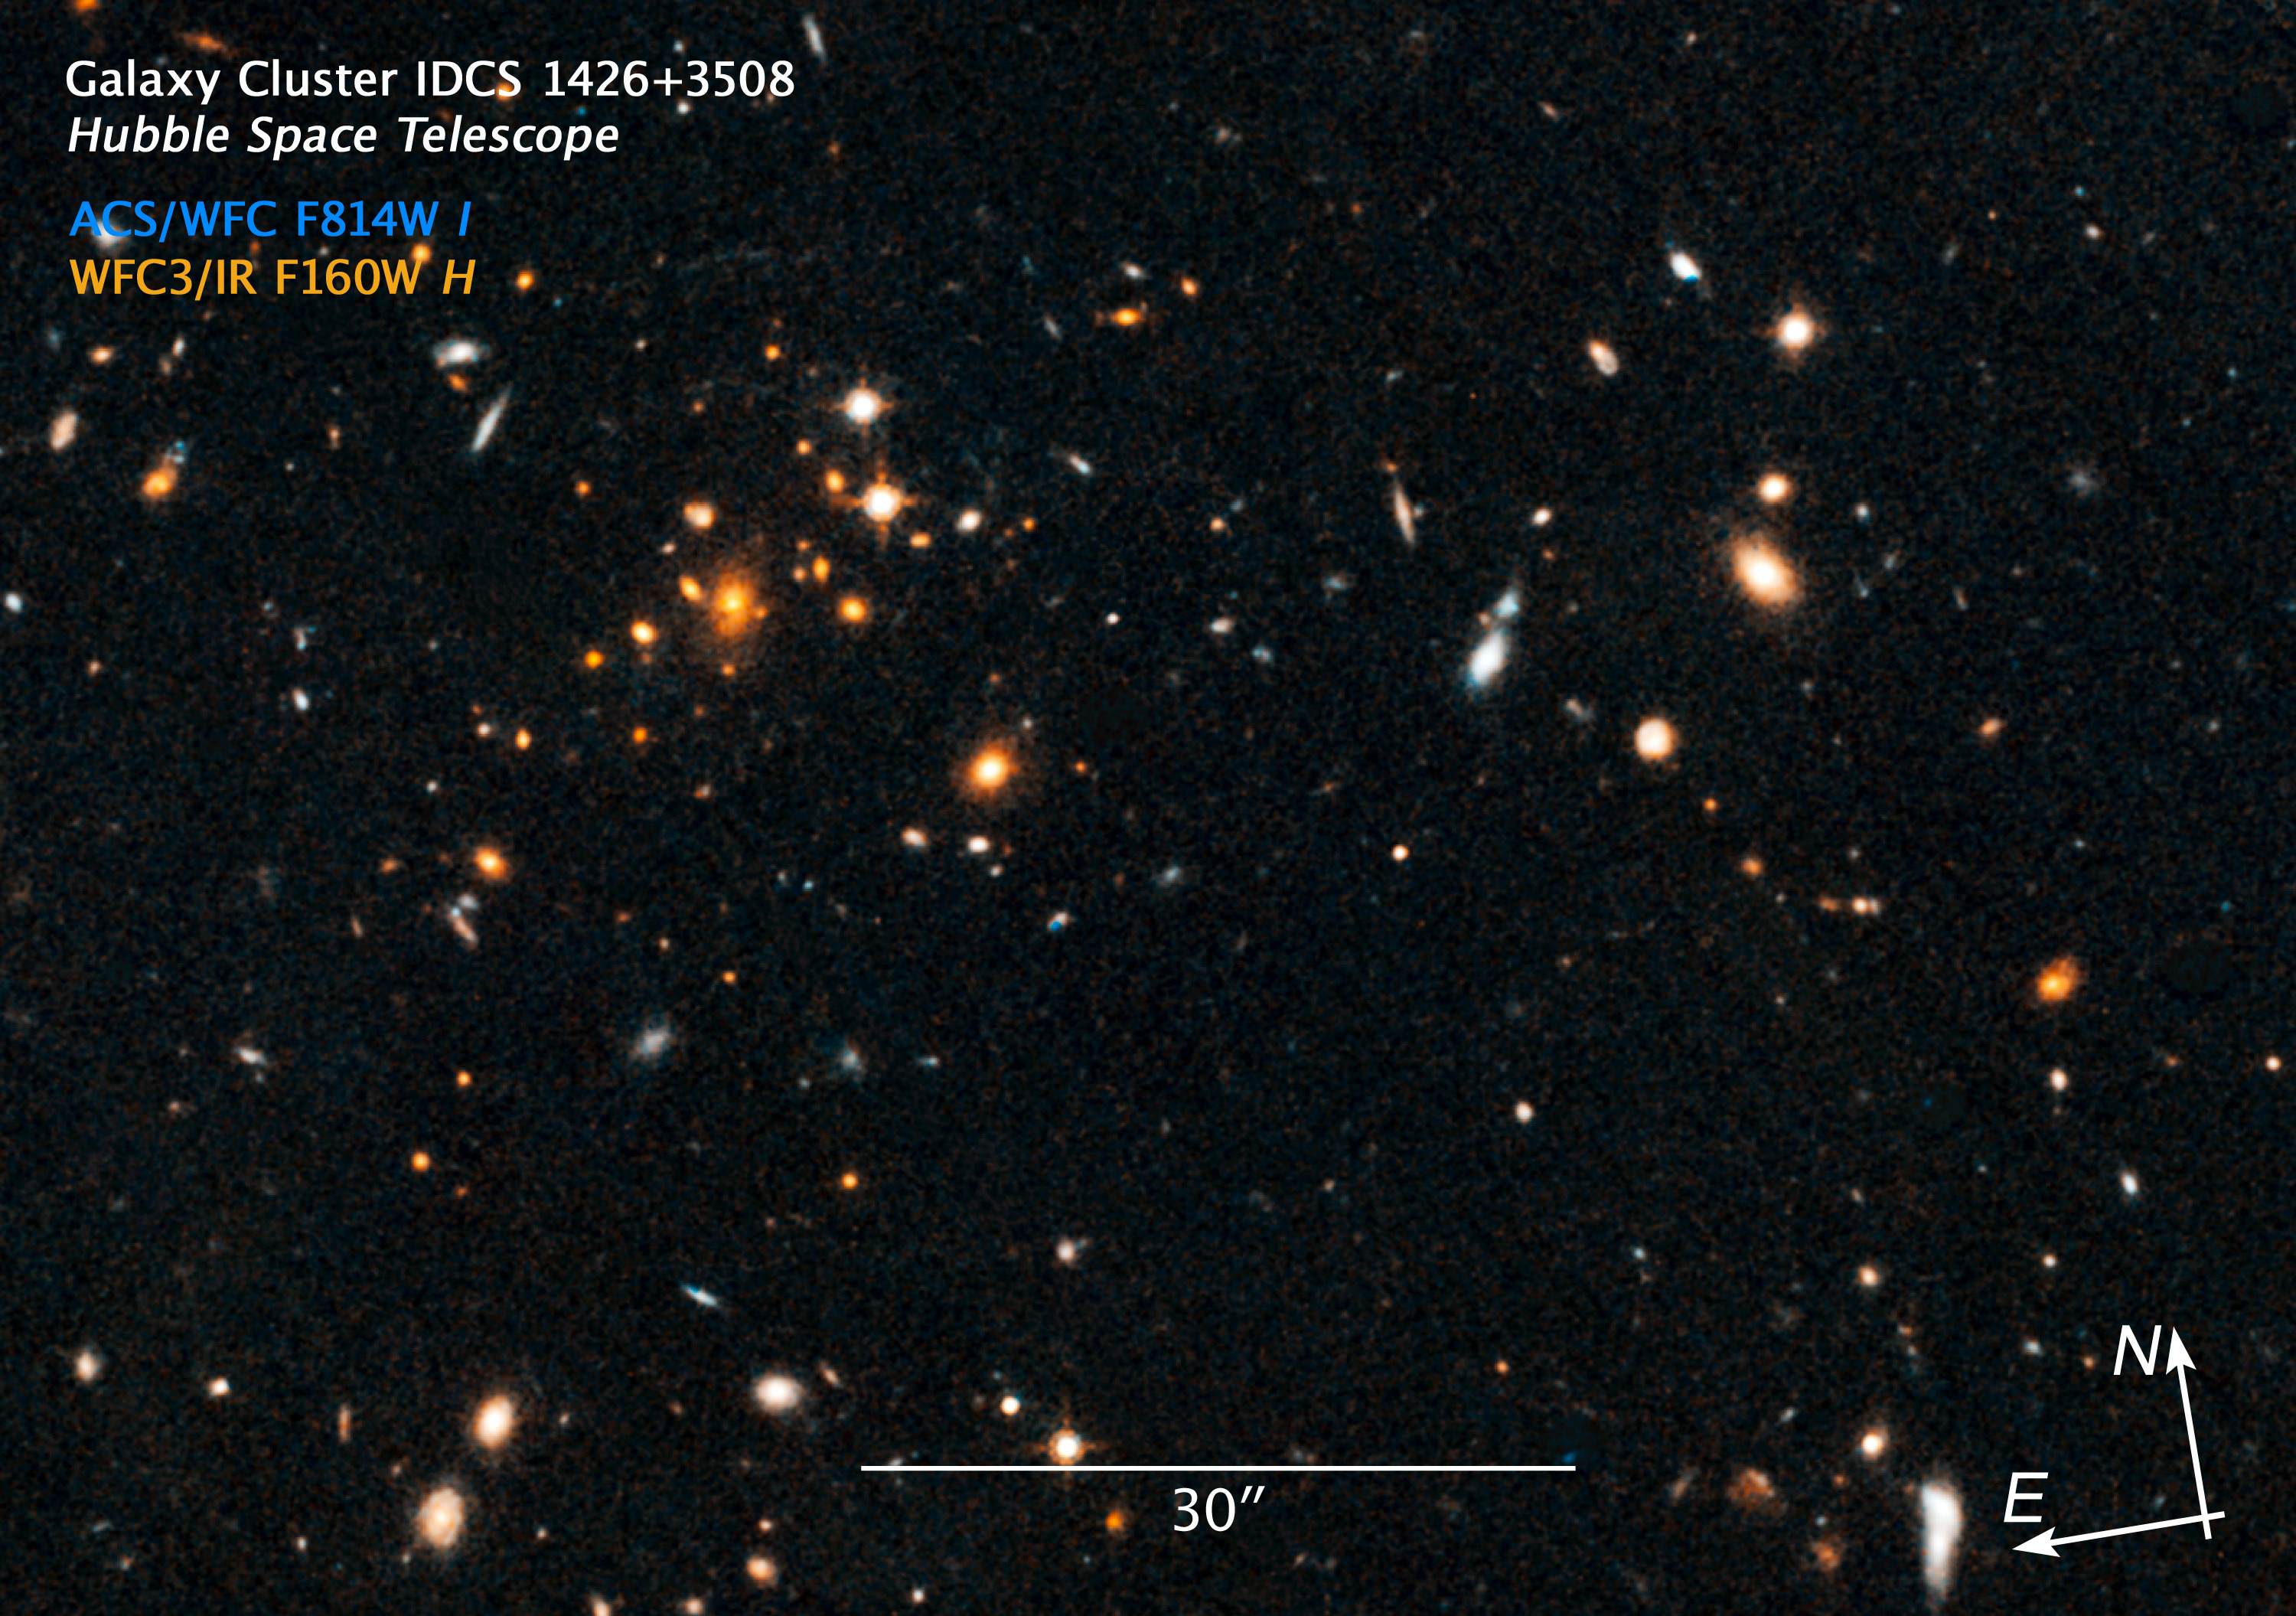

Compass and scale image of IDCS J1426.5+3508

The galaxy cluster IDCS J1426.5+3508 is more than 10 billion light years away and the most massive galaxy cluster ever discovered at this distance. The total mass of the cluster is as much as 500 tillion times the Sun and it is 10 times larger than other clusters found in a similar epoch of the early universe.

The cluster is so heavy that it is functioning as a gigantic gravitational lense: A faint elongated, blue arc can be seen in the upper left oft the image. It is the light of en even more distant galaxy which is only visible because of the IDCS J1426.5+3508 cluster in front of it.

Credit: NASA, ESA/Huuble, and A. Gonzalez (University of Florida, Gainesville, USA), A. Stanford (University of California, Davis and Lawrence Livermore National Laboratory, USA) and M. Brodwin (University of Missouri-Kansas City and Harvard-Smithsonian Center for Astrophysics, USA). Illustration Credit: NASA, ESA, and Z. Levay (STScI, USA).